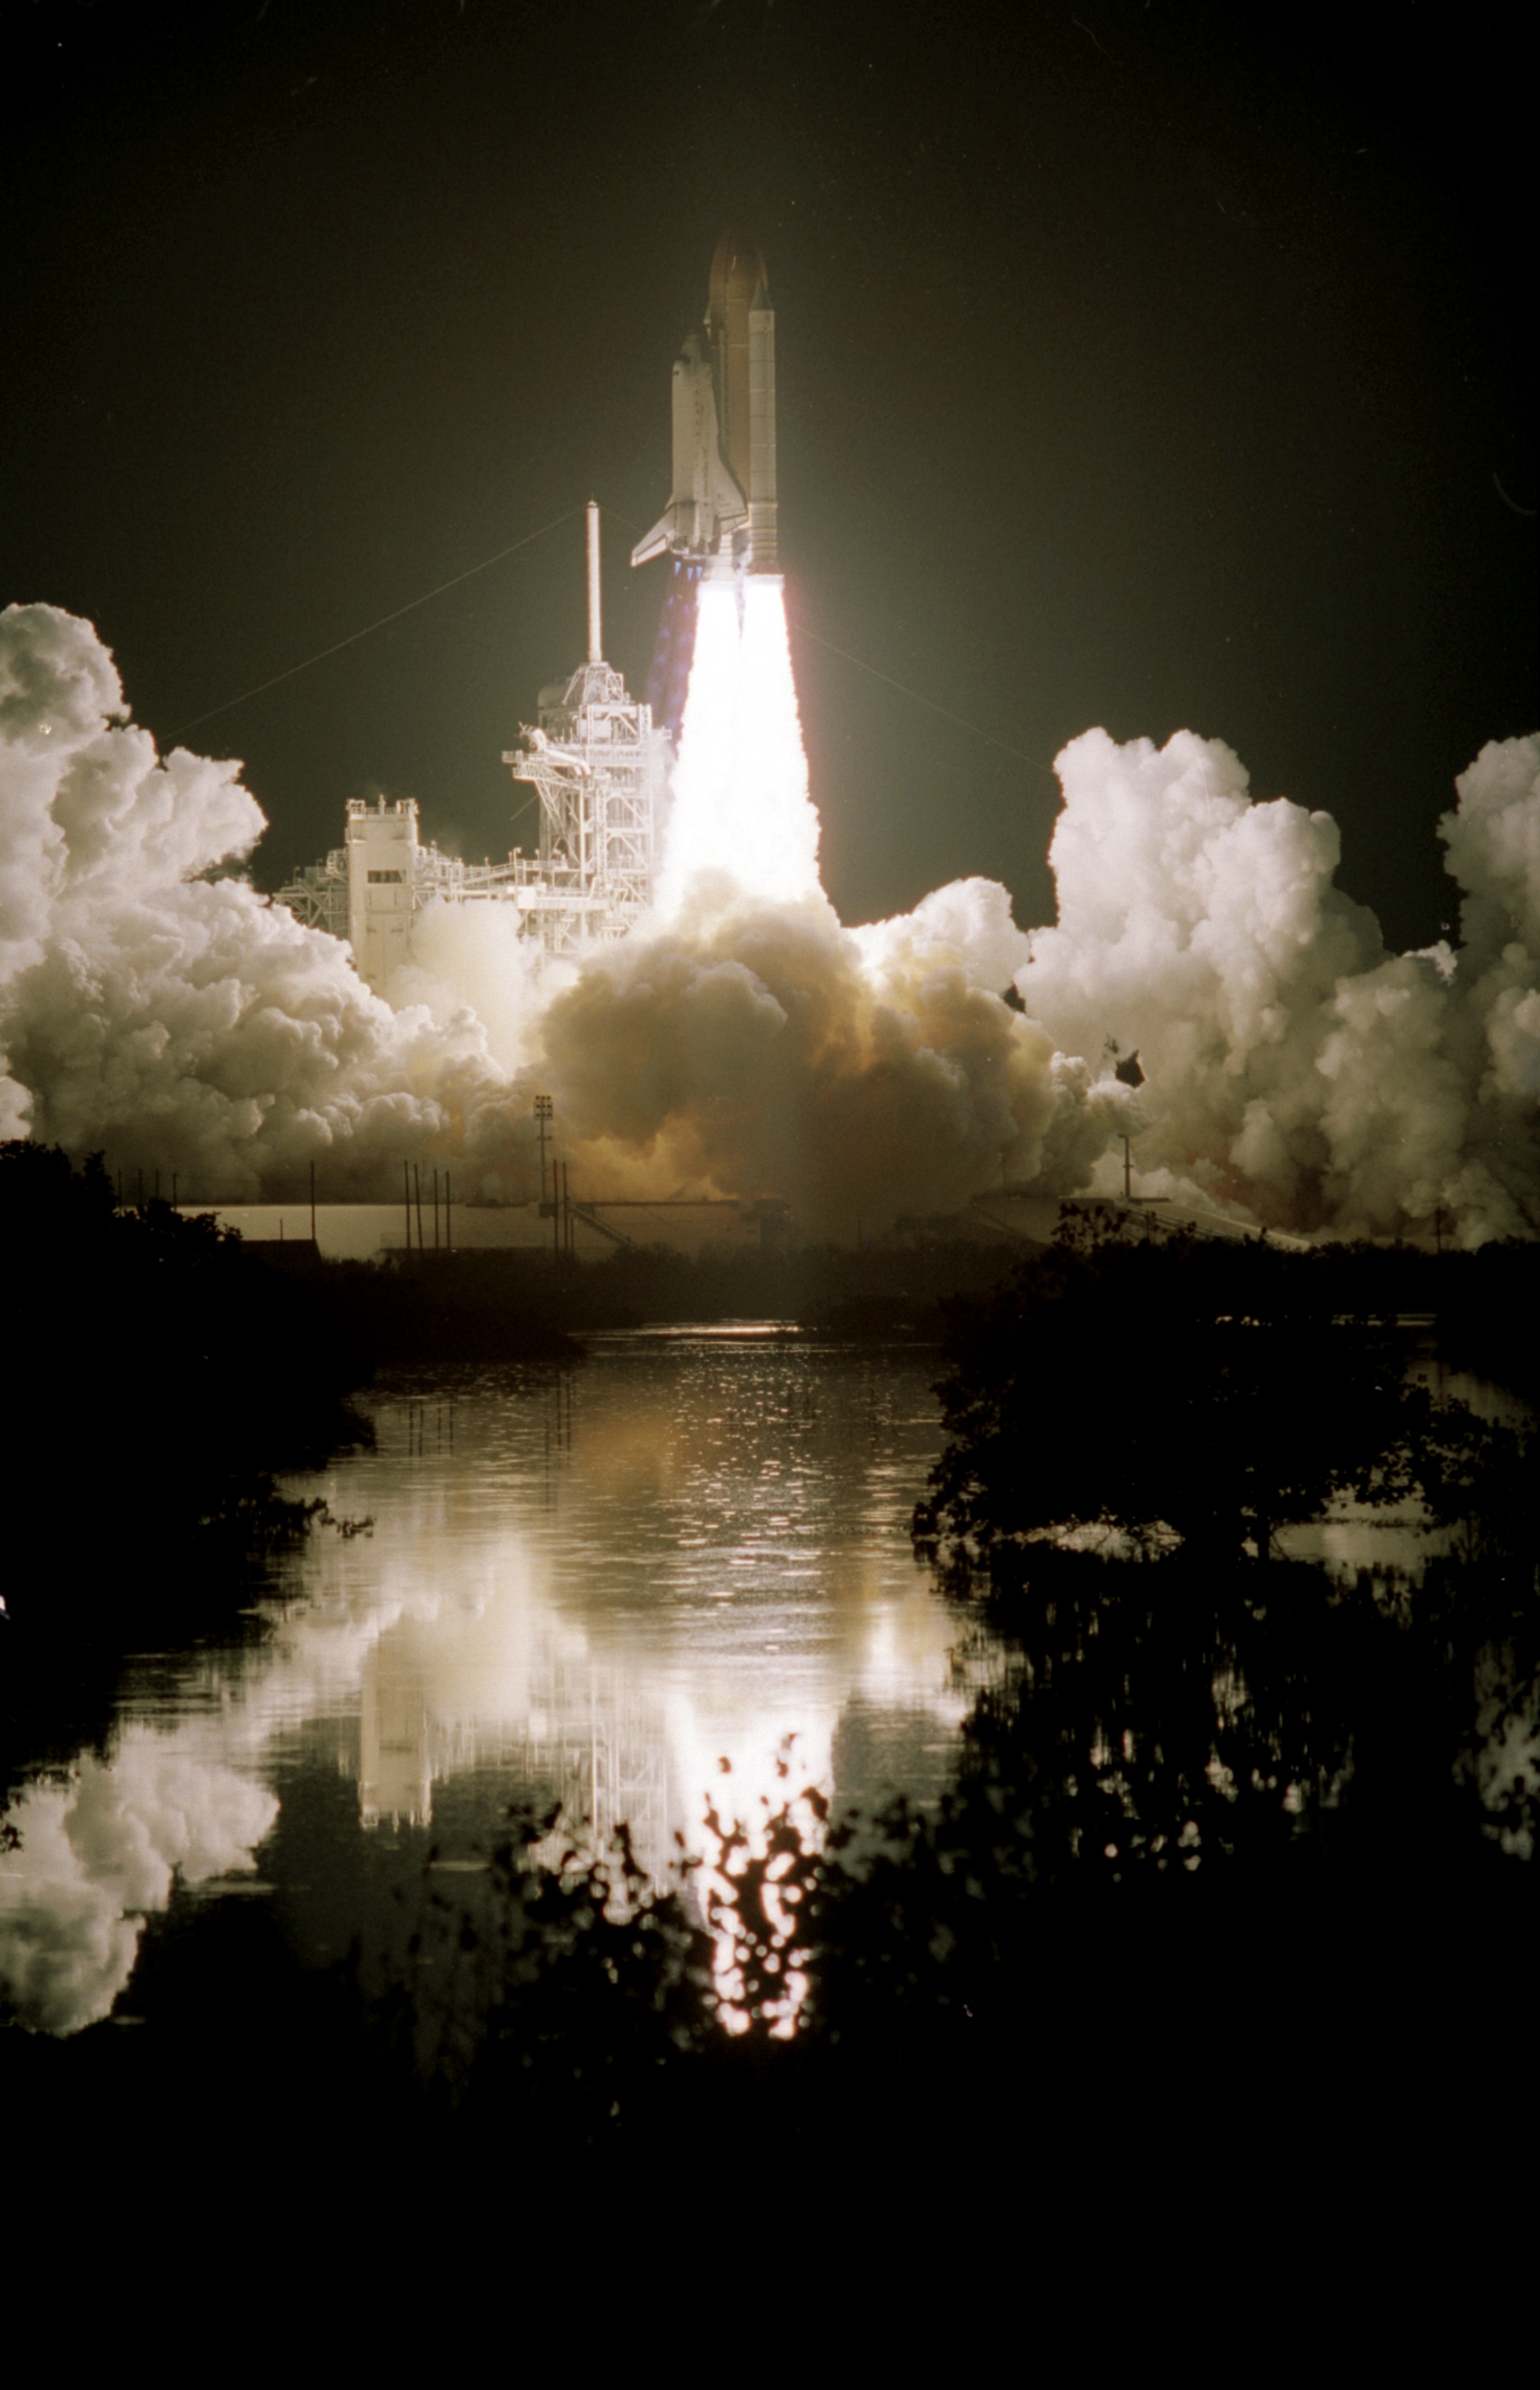

SM3A: Discovery Liftoff

The Space Shuttle Discovery, reflected in nearby water, lifts off into the clear night sky to begin the 96th mission in the STS program.

Credit: NASA/ESA